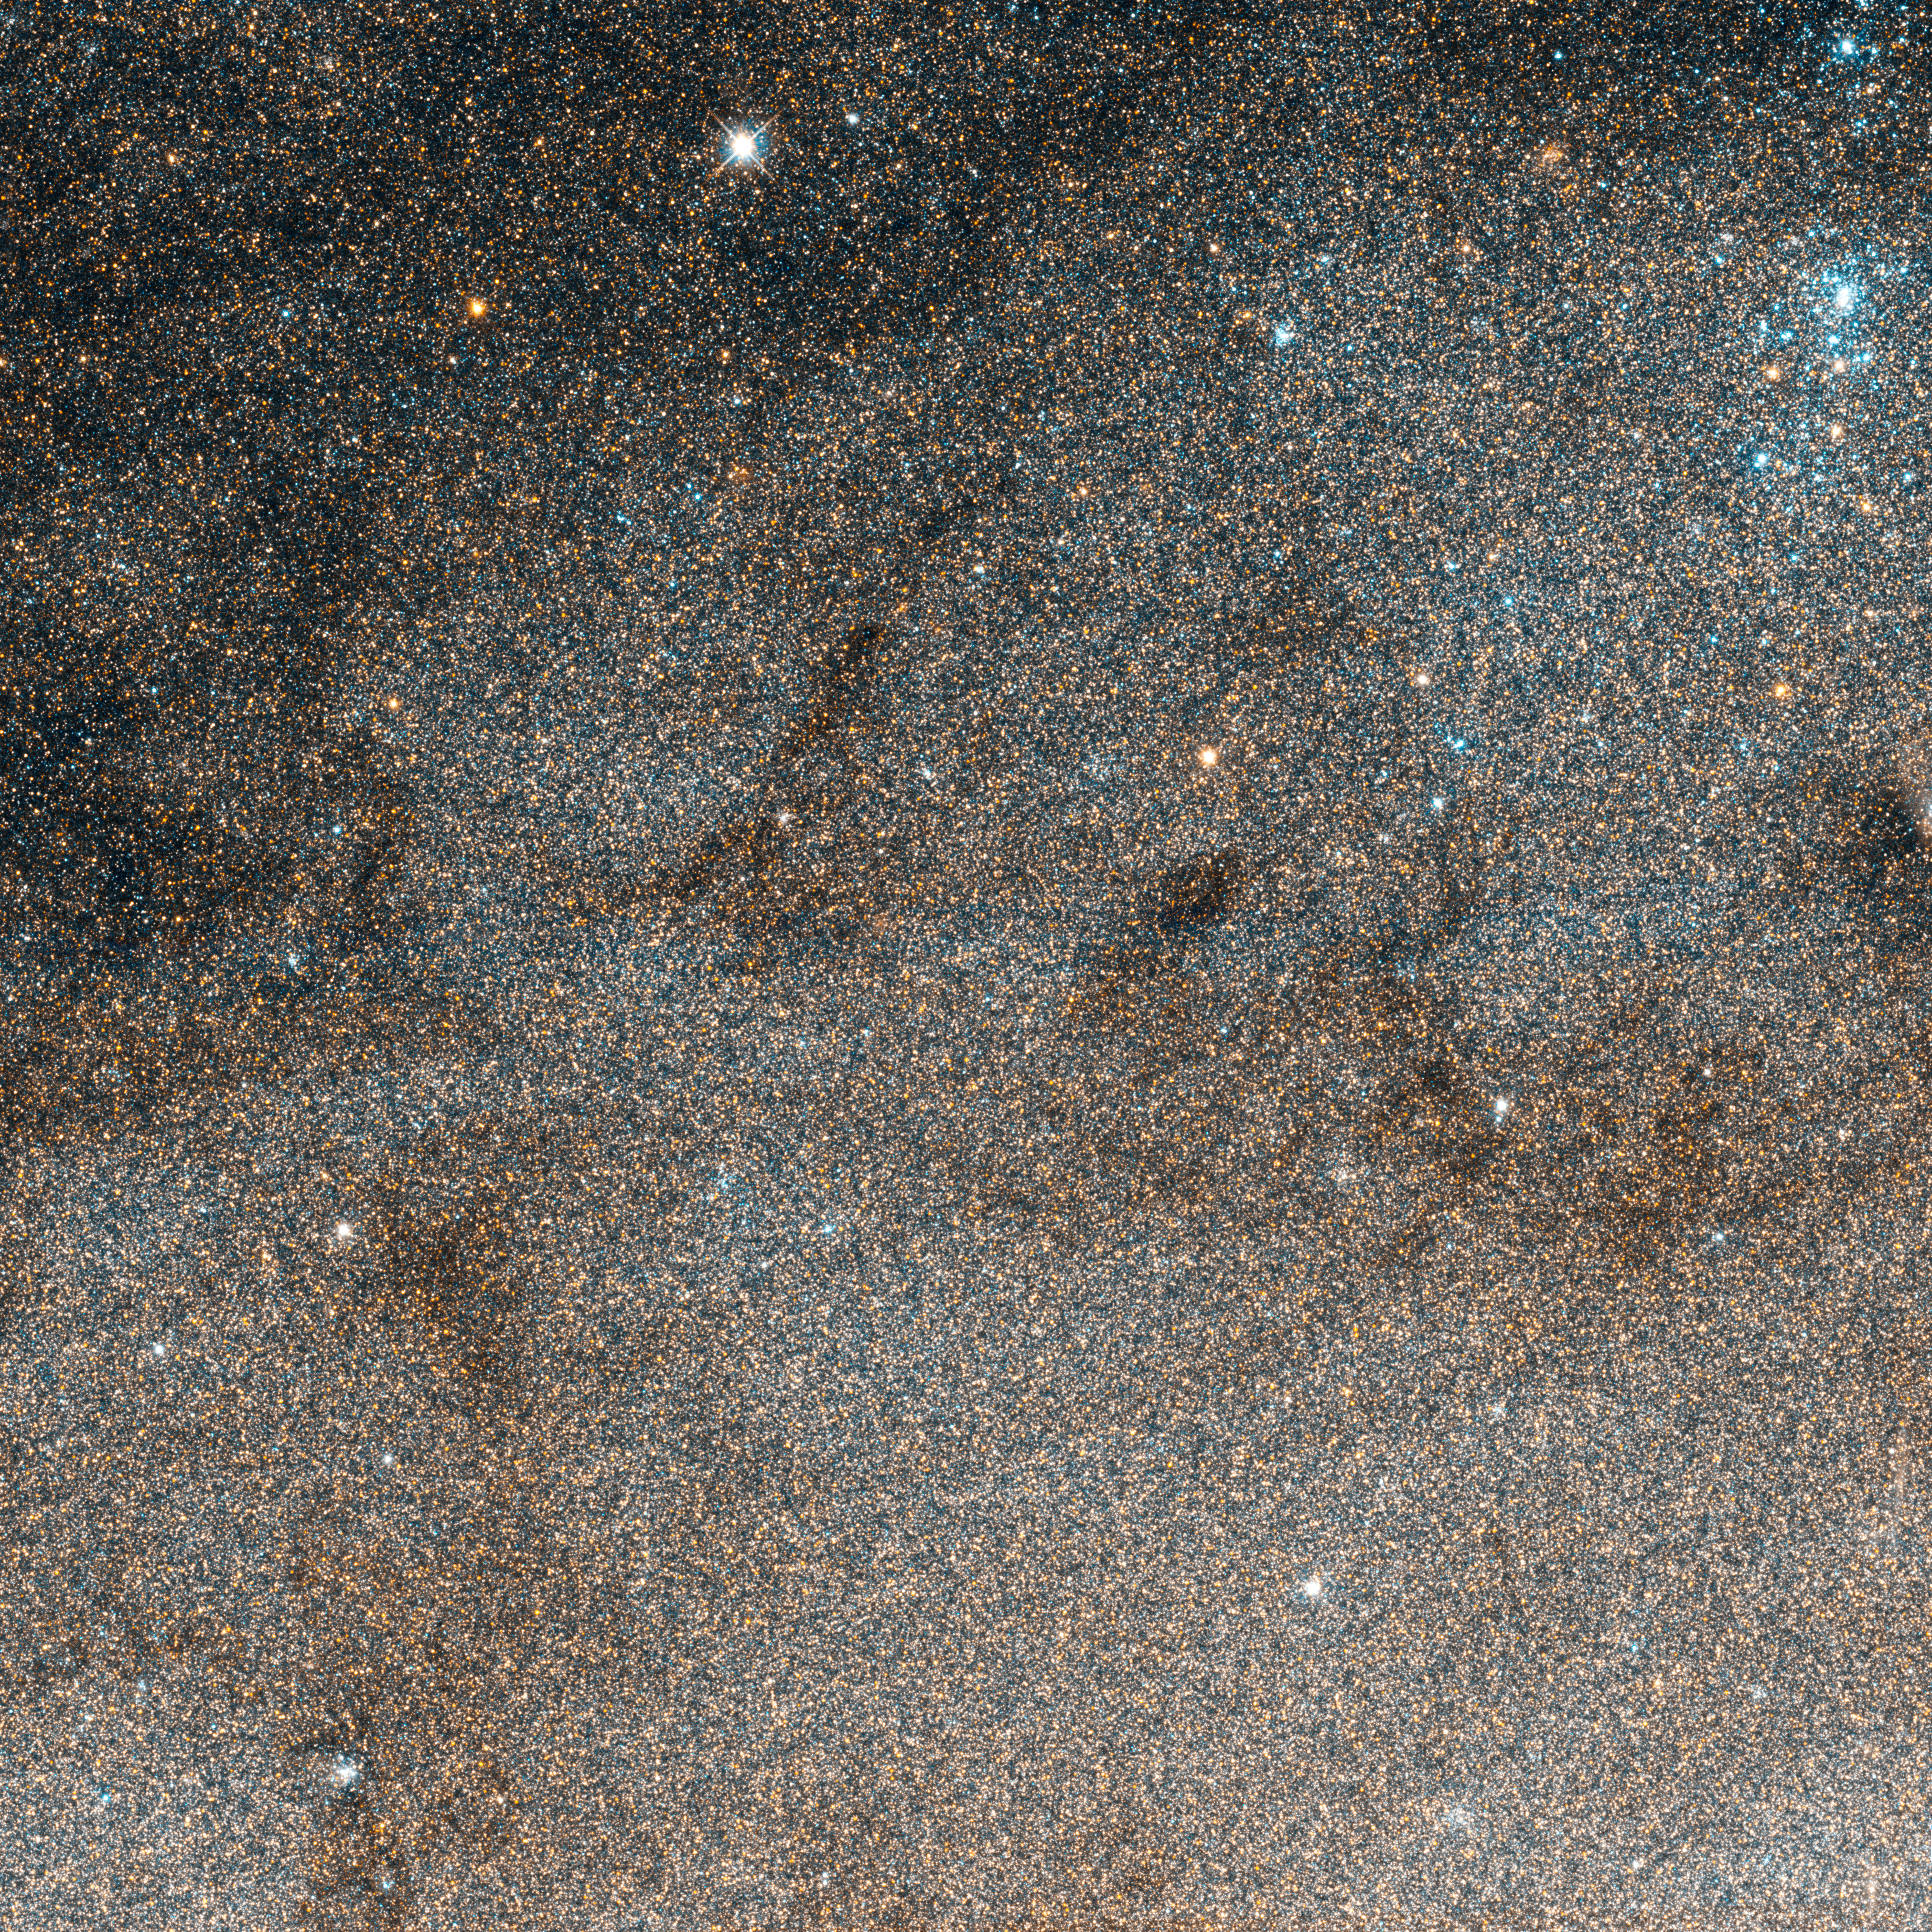

Hubble’s cepheid in the Andromeda Galaxy

The Hubble Space Telescope has imaged the star field around the Cepheid variable V1 in M31. This image shows individually resolved stars in the outer disk of the Andromeda Galaxy. The soft, brown swirls are dust lanes are obscuring light from stars farther away from our line of sight. The blue cluster towards the upper right of the image contains massive young stars that are emitting intense ultraviolet light. The Cepheid variable, V1, the first Cepheid ever found outside of our own galaxy, is a moderate looking star in the lower left of the image.

Credit: NASA, ESA and the Hubble Heritage Team (STScI/AURA)